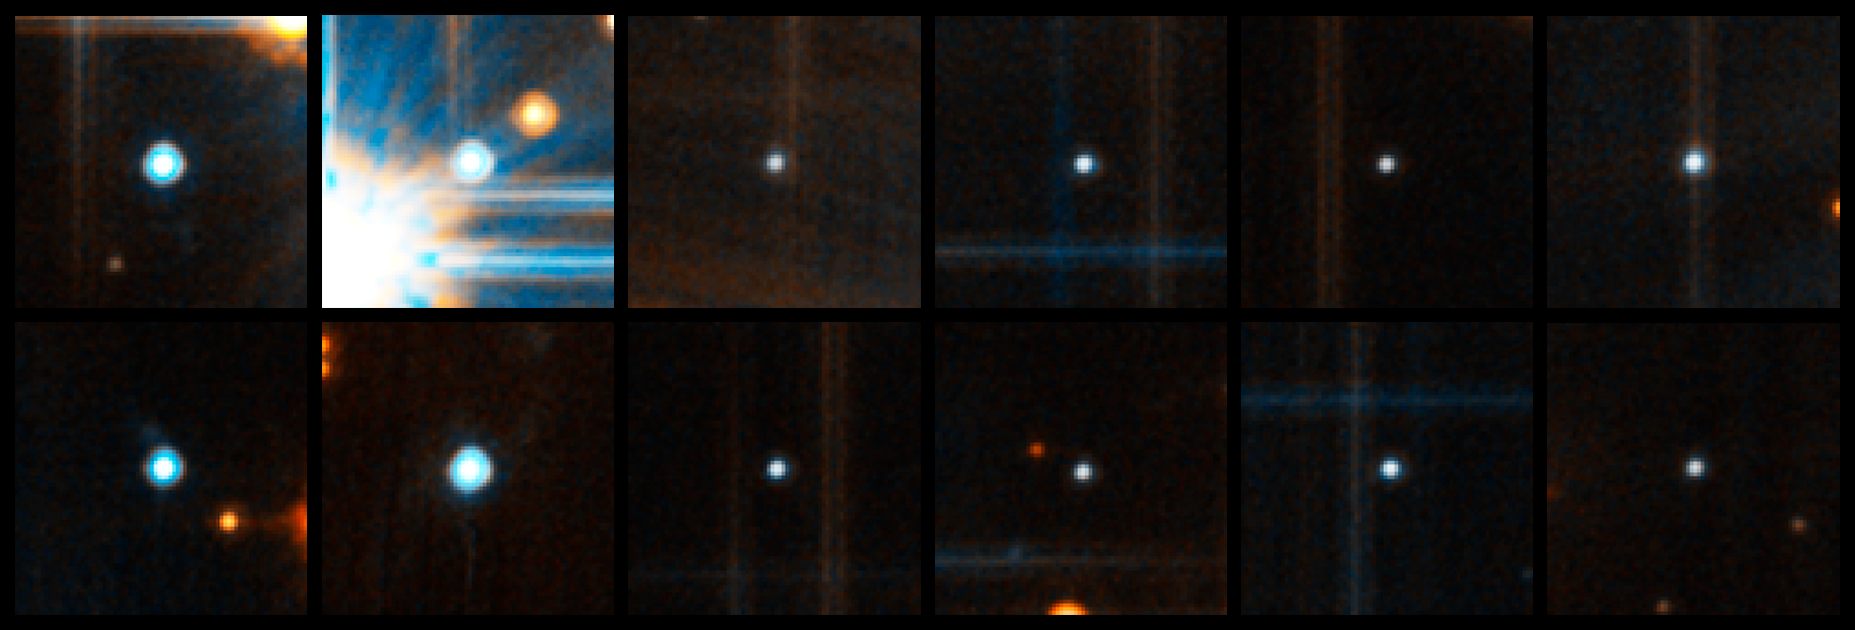

White Dwarfs in NGC 6397 (Hubble)

White Dwarfs in NGC 6397 (Hubble)

Credit: NASA, ESA, and H. Richer (University of British Columbia)